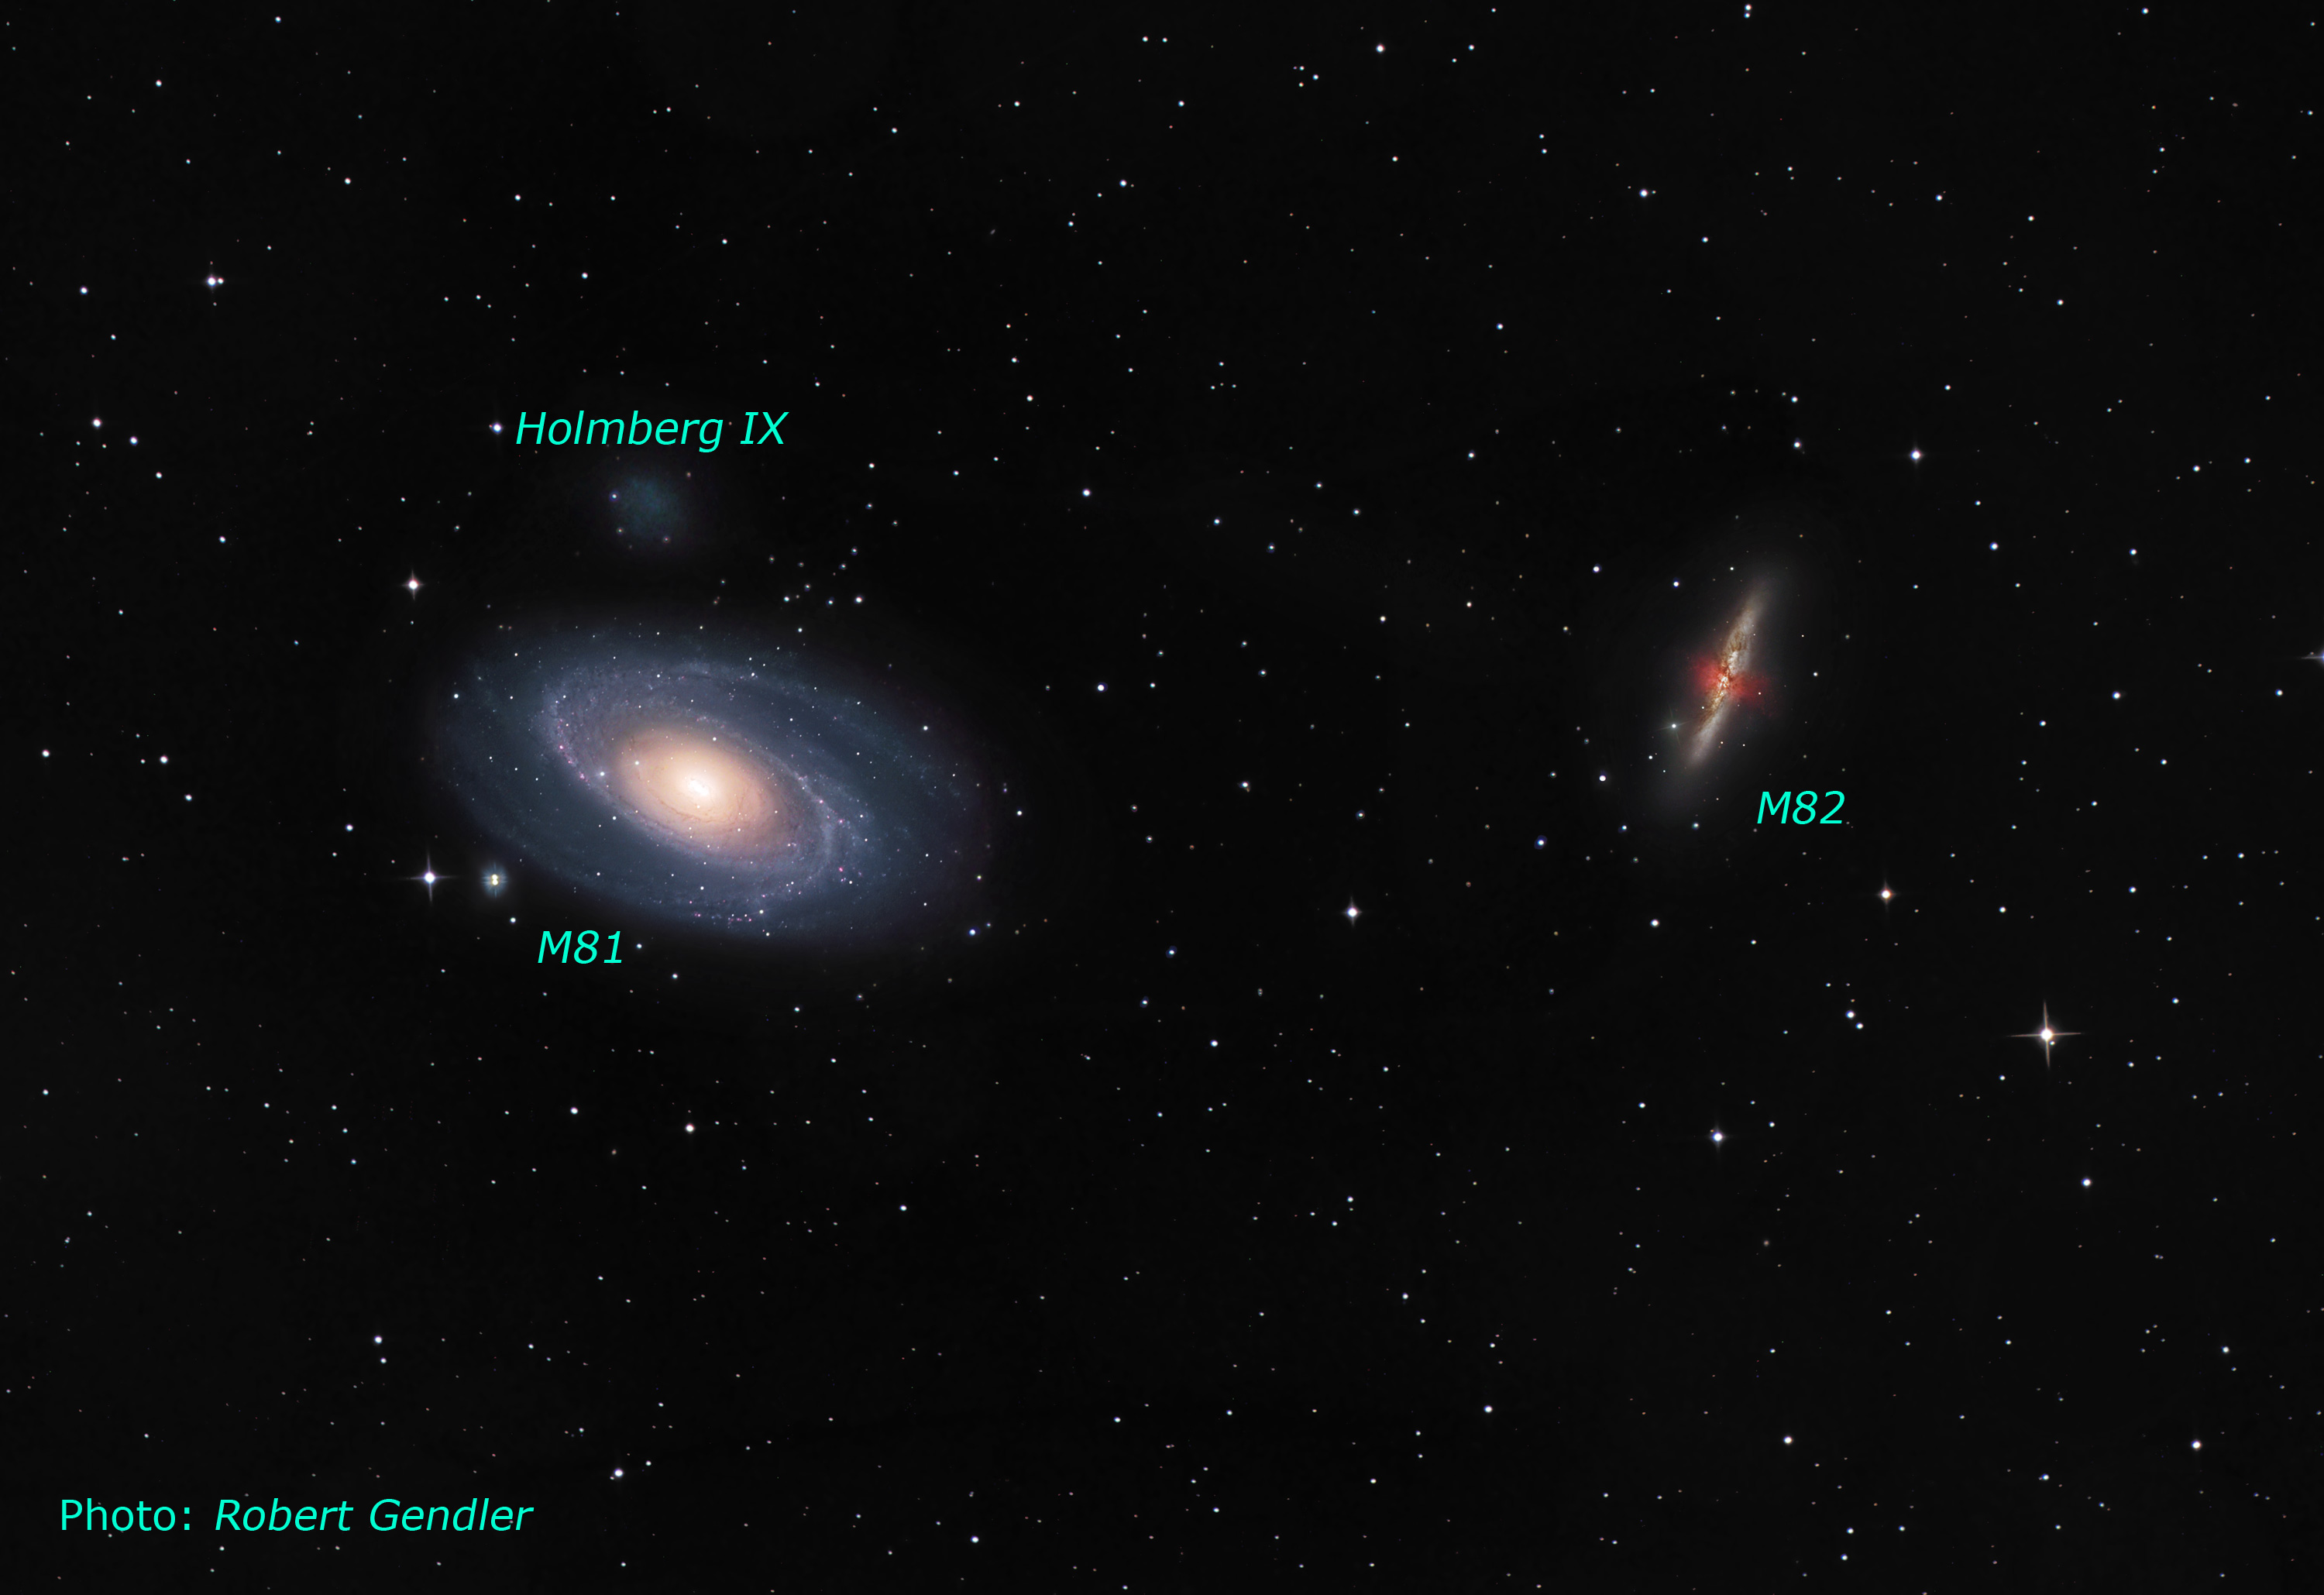

Ground-based image of the M81/M82 Galaxy Group

This wide-angle image taken by astrophotographer Robert Gendler shows the amazing duo of Messier 81 (right) and Messier 82 (left). These two mighty galaxies in the Plough (Ursa Major) belong to some of the most famous and beloved galaxies known to amateur astronomers.

Credit: NASA, ESA, Z. Levay (STScI) and R. Gendler